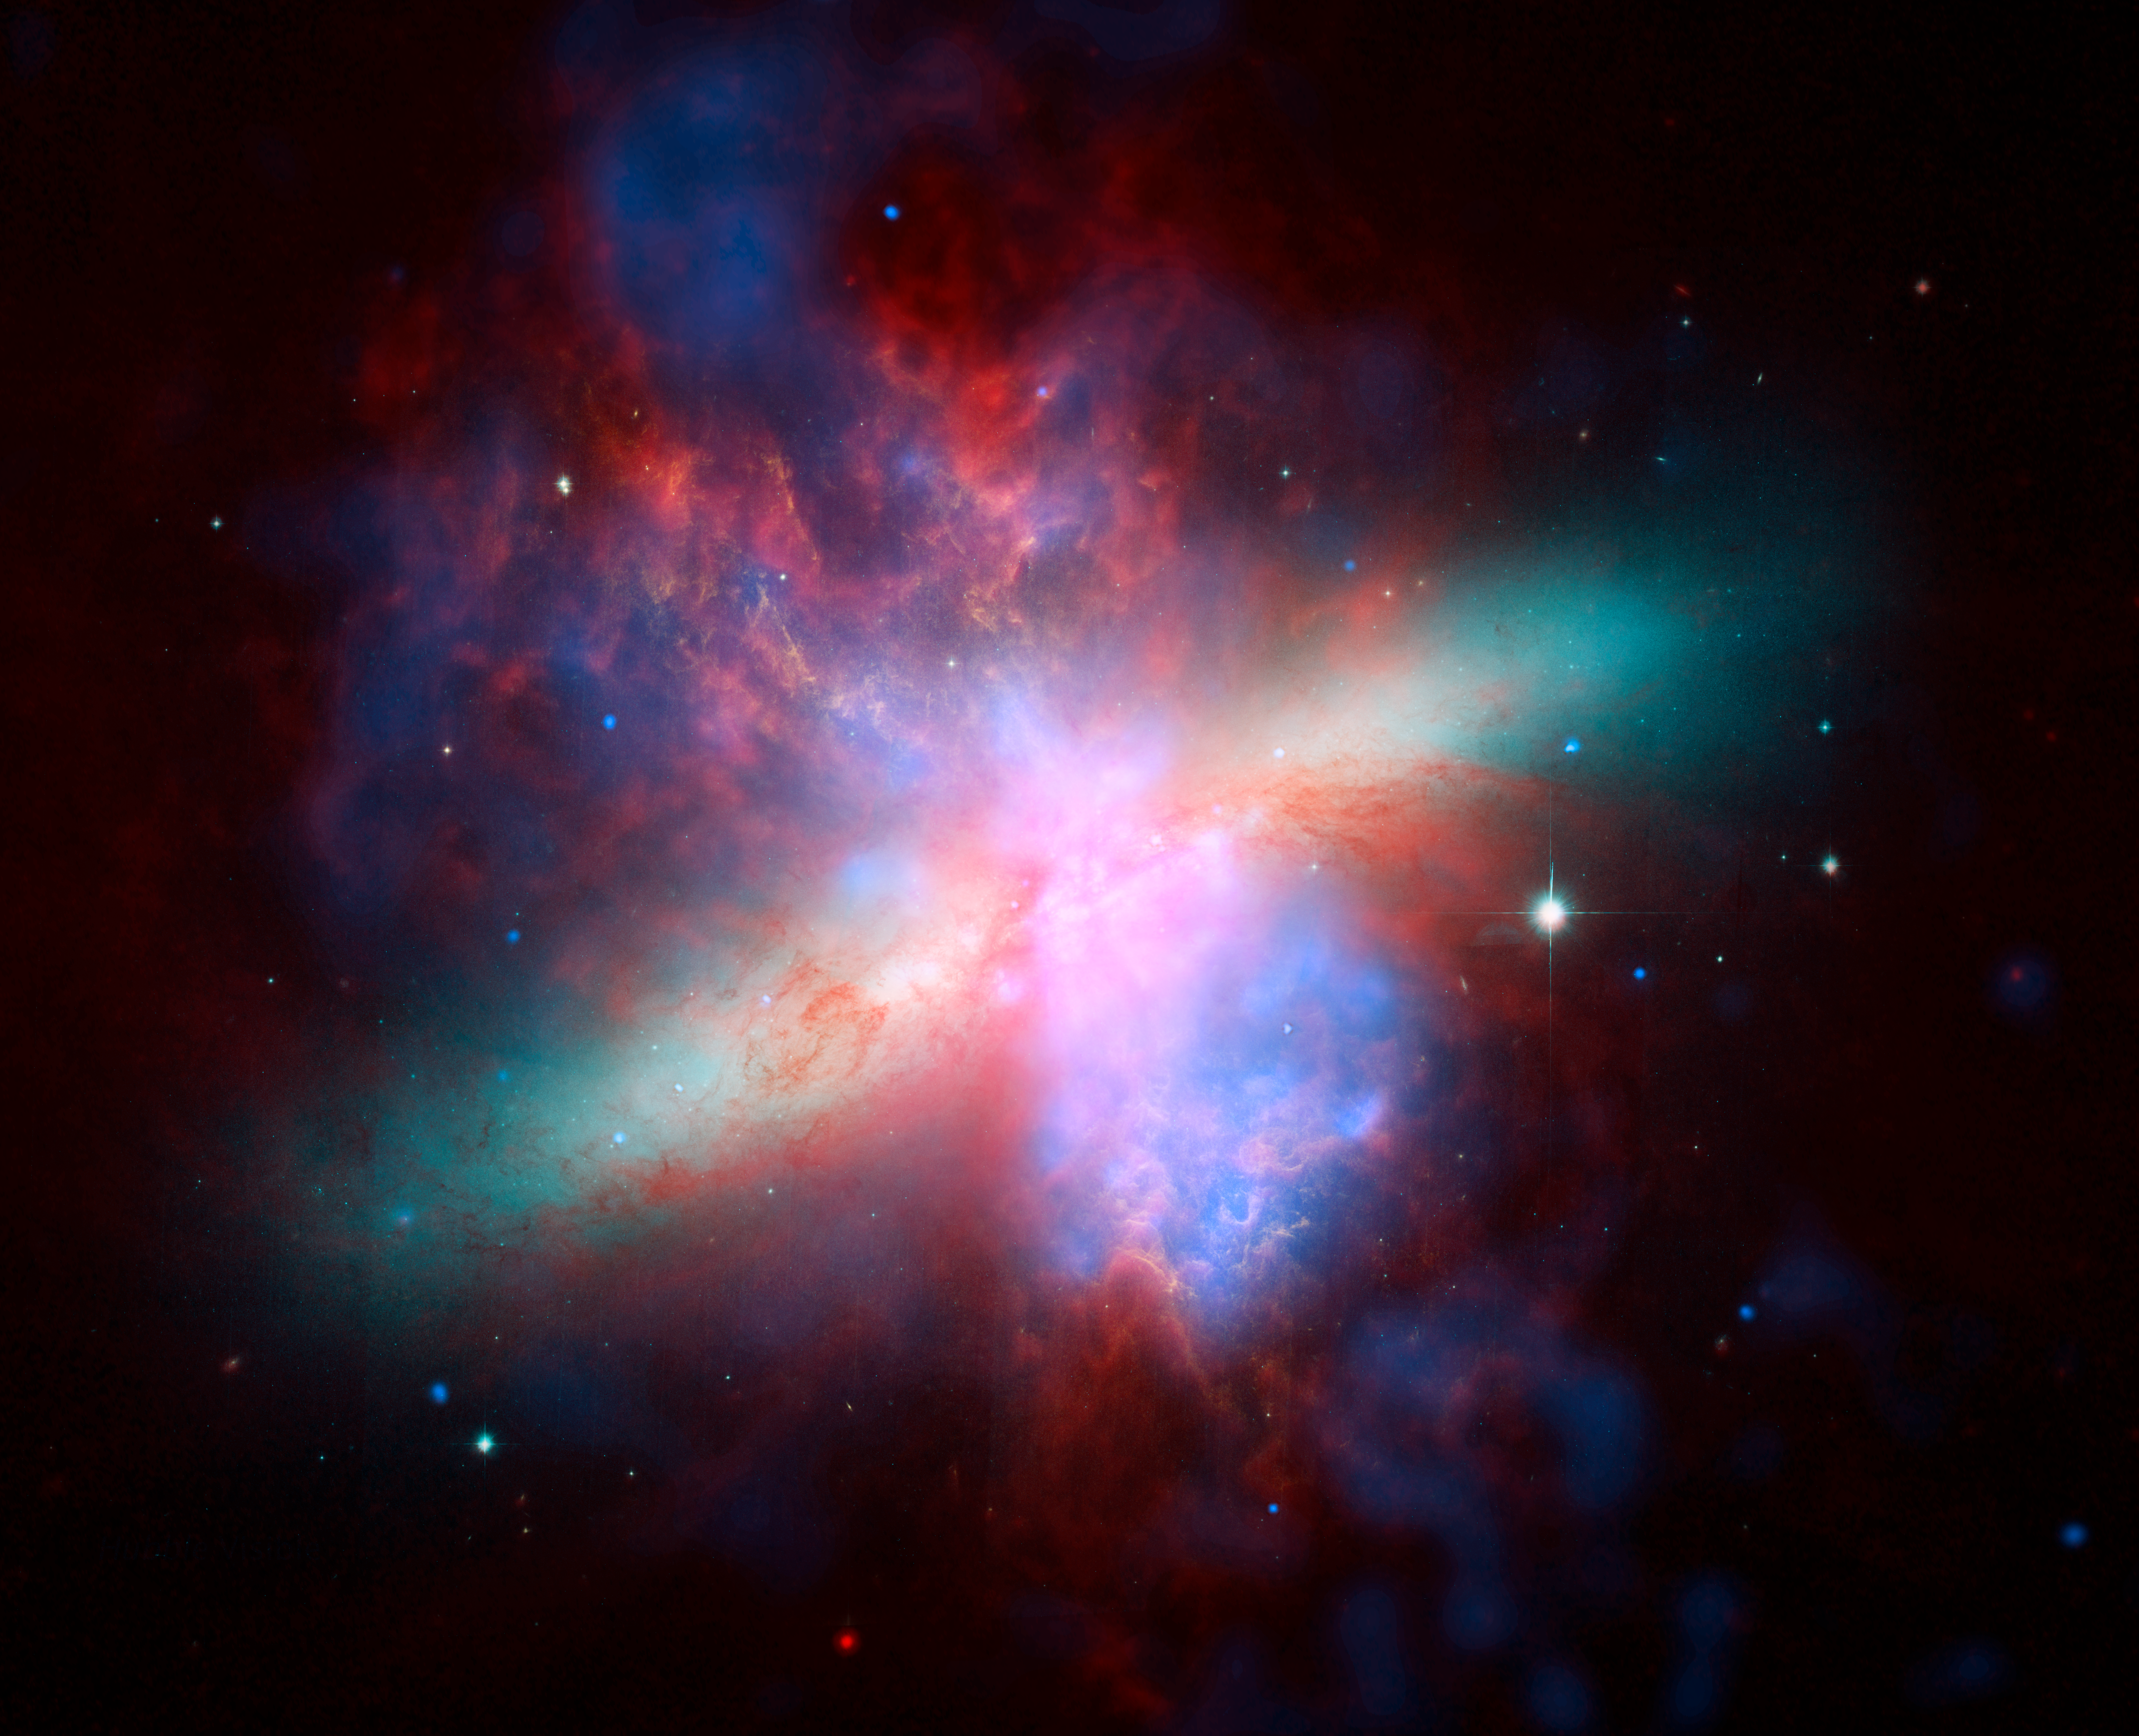

Great observatories composite

Composite of images of the active galaxy Messier 82 from the three Great Observatories: Hubble Space Telescope, Chandra X-Ray Observatory, and Spitzer Space Telescope. X-ray data recorded by Chandra appears here in blue, infrared light recorded by Spitzer appears in red. Hubble's observation of hydrogen emission appears in orange. Hubble's bluest observation appears in yellow-green.

Credit: NASA, ESA, CXC, and JPL-Caltech